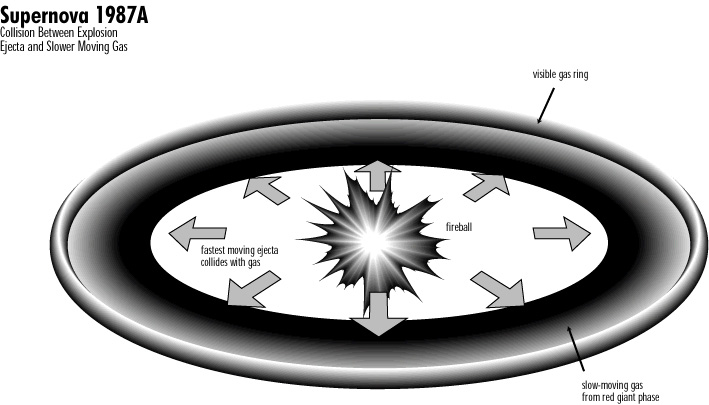

Supernova 1987a

Illustration: Collsion Between Explosion Ejecta and Slower Moving Gas

Credit: NASA & ESA